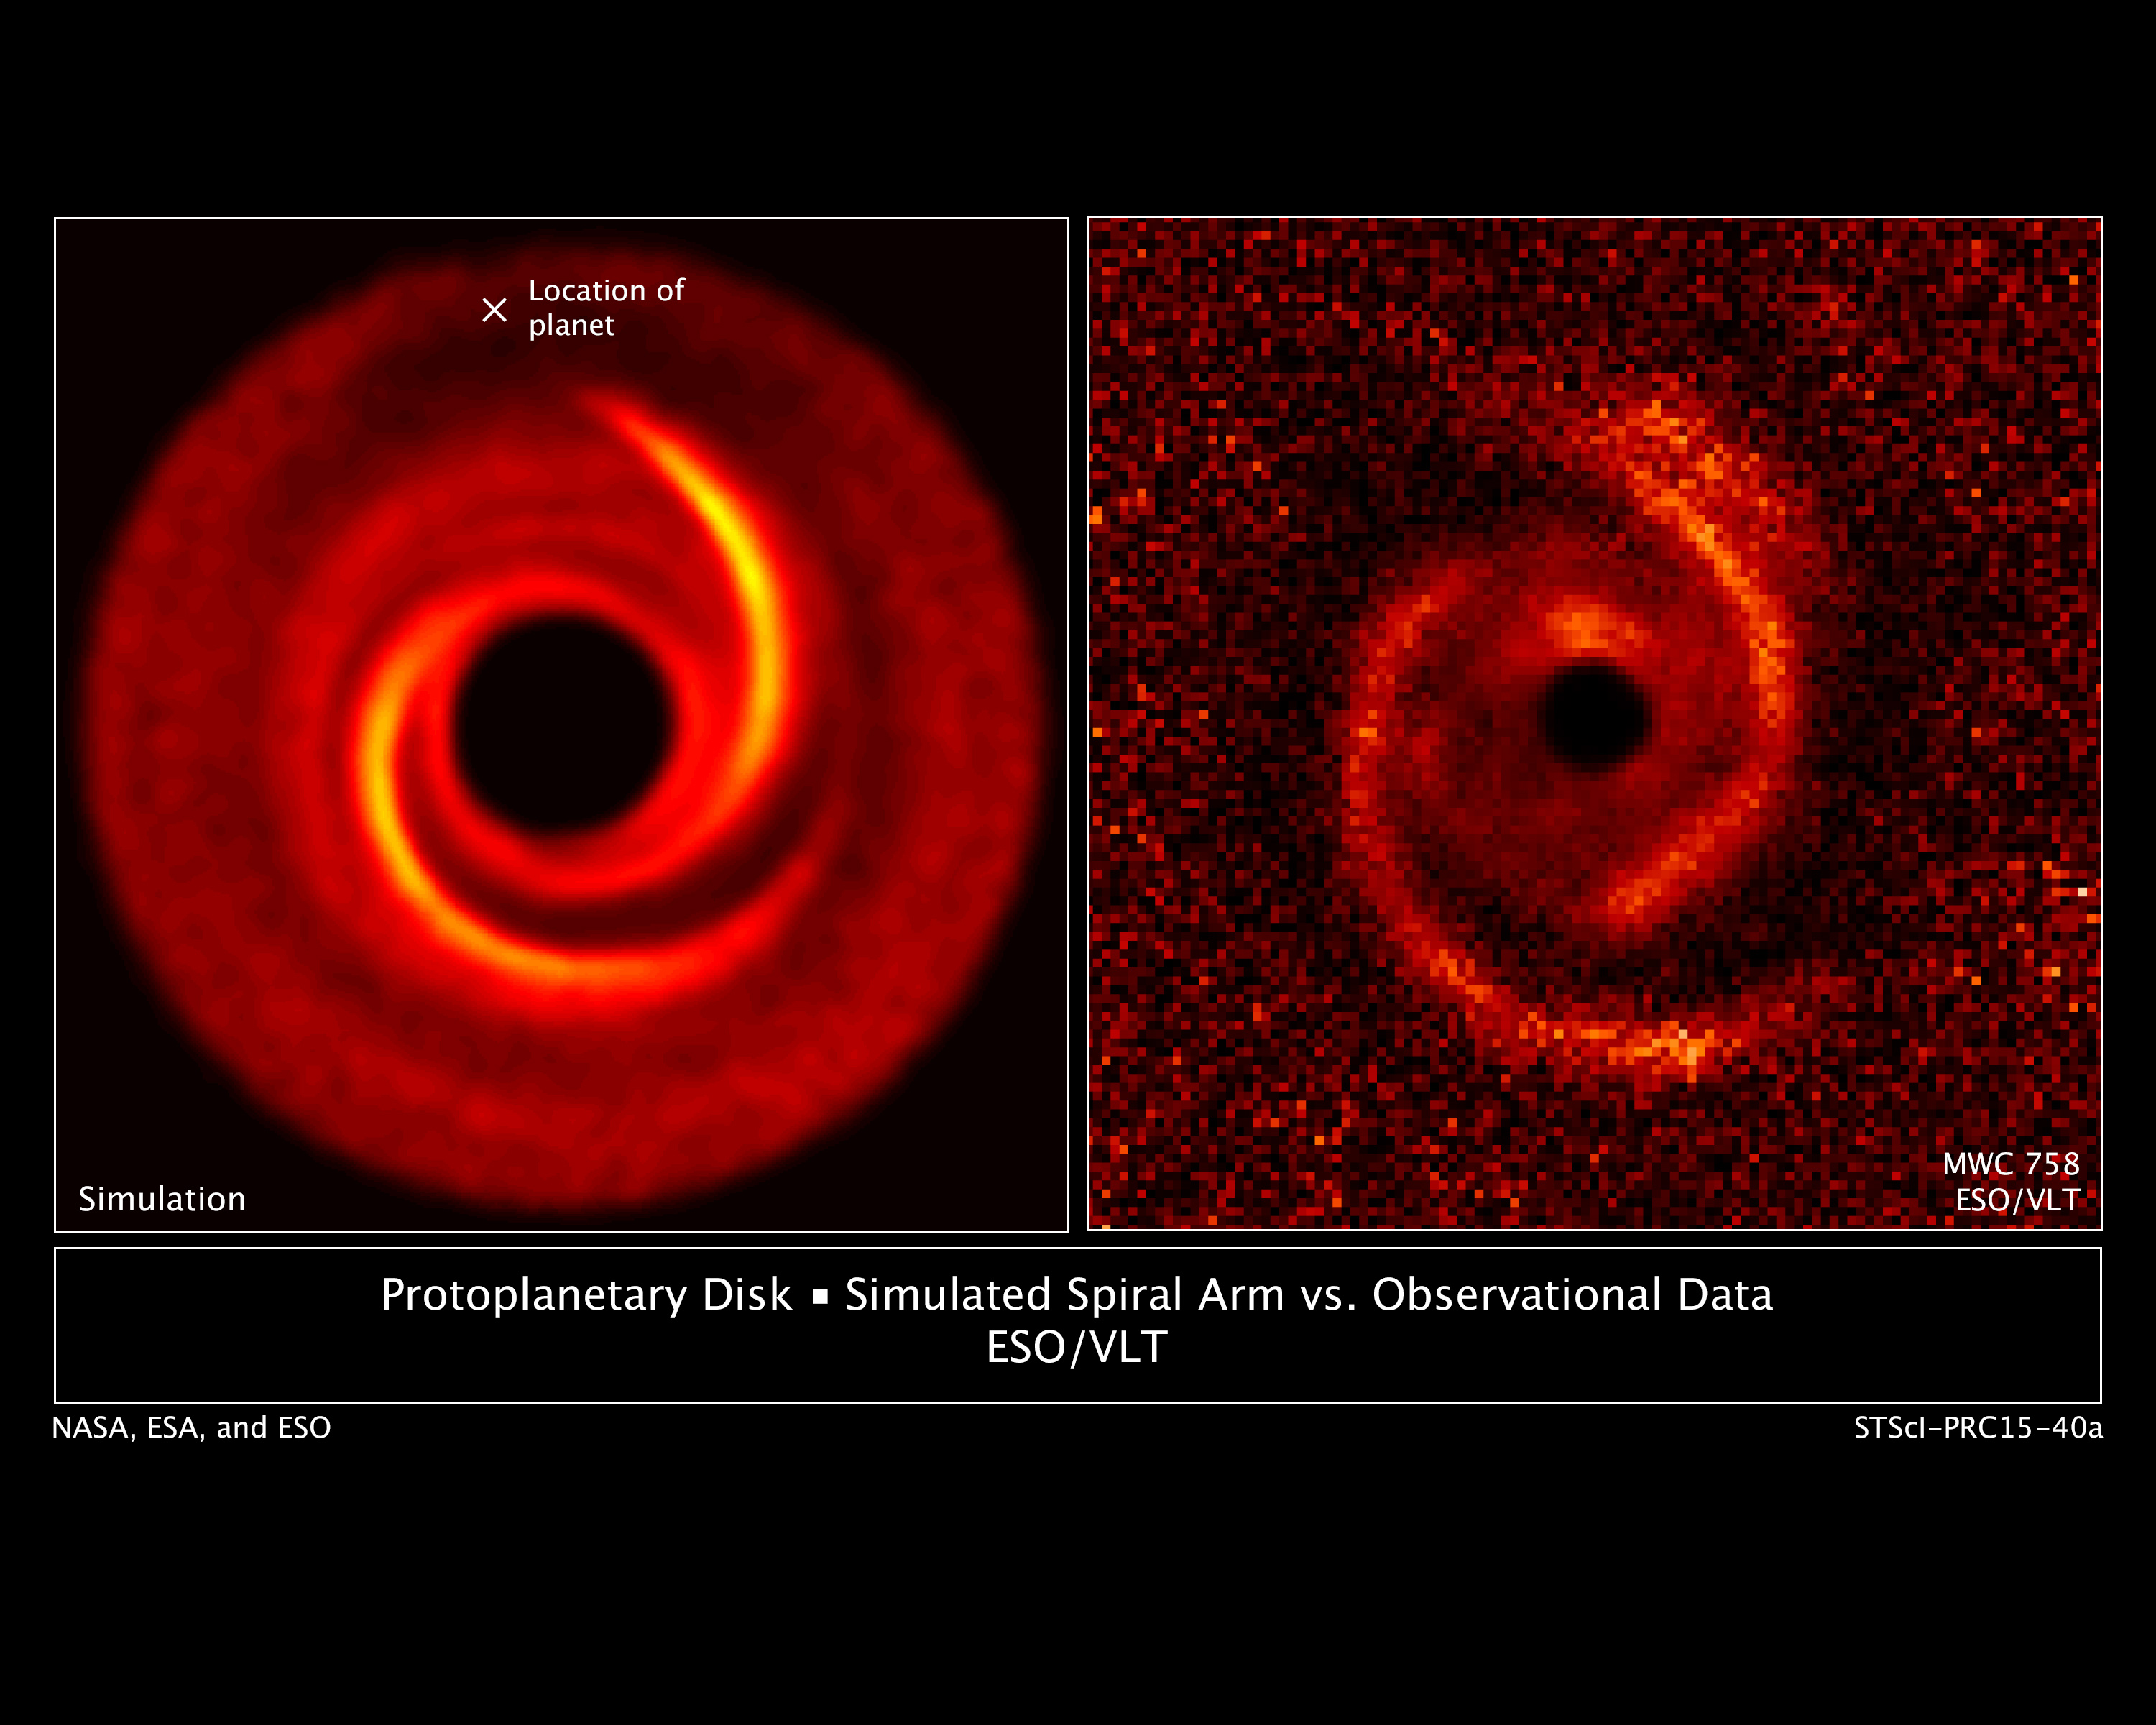

Protoplanetary Disk: Simulated Spiral Arm vs. Observational Data

[Right] — Observations taken by the European Southern Observatory's Very Large Telescope show a protoplanetary disk around the young star MWC 758. The disk has two spiral arms that extend over 10 billion miles from the star.

[Left] — A computer model reproduces the two-spiral-arm structure; the "x" is the location of a putative planet. The planet, which cannot be seen directly, probably excites the two spiral arms.

Credit: NASA, ESA, ESO, M. Benisty et al. (University of Grenoble), R. Dong (Lawrence Berkeley National Laboratory), and Z. Zhu (Princeton University)